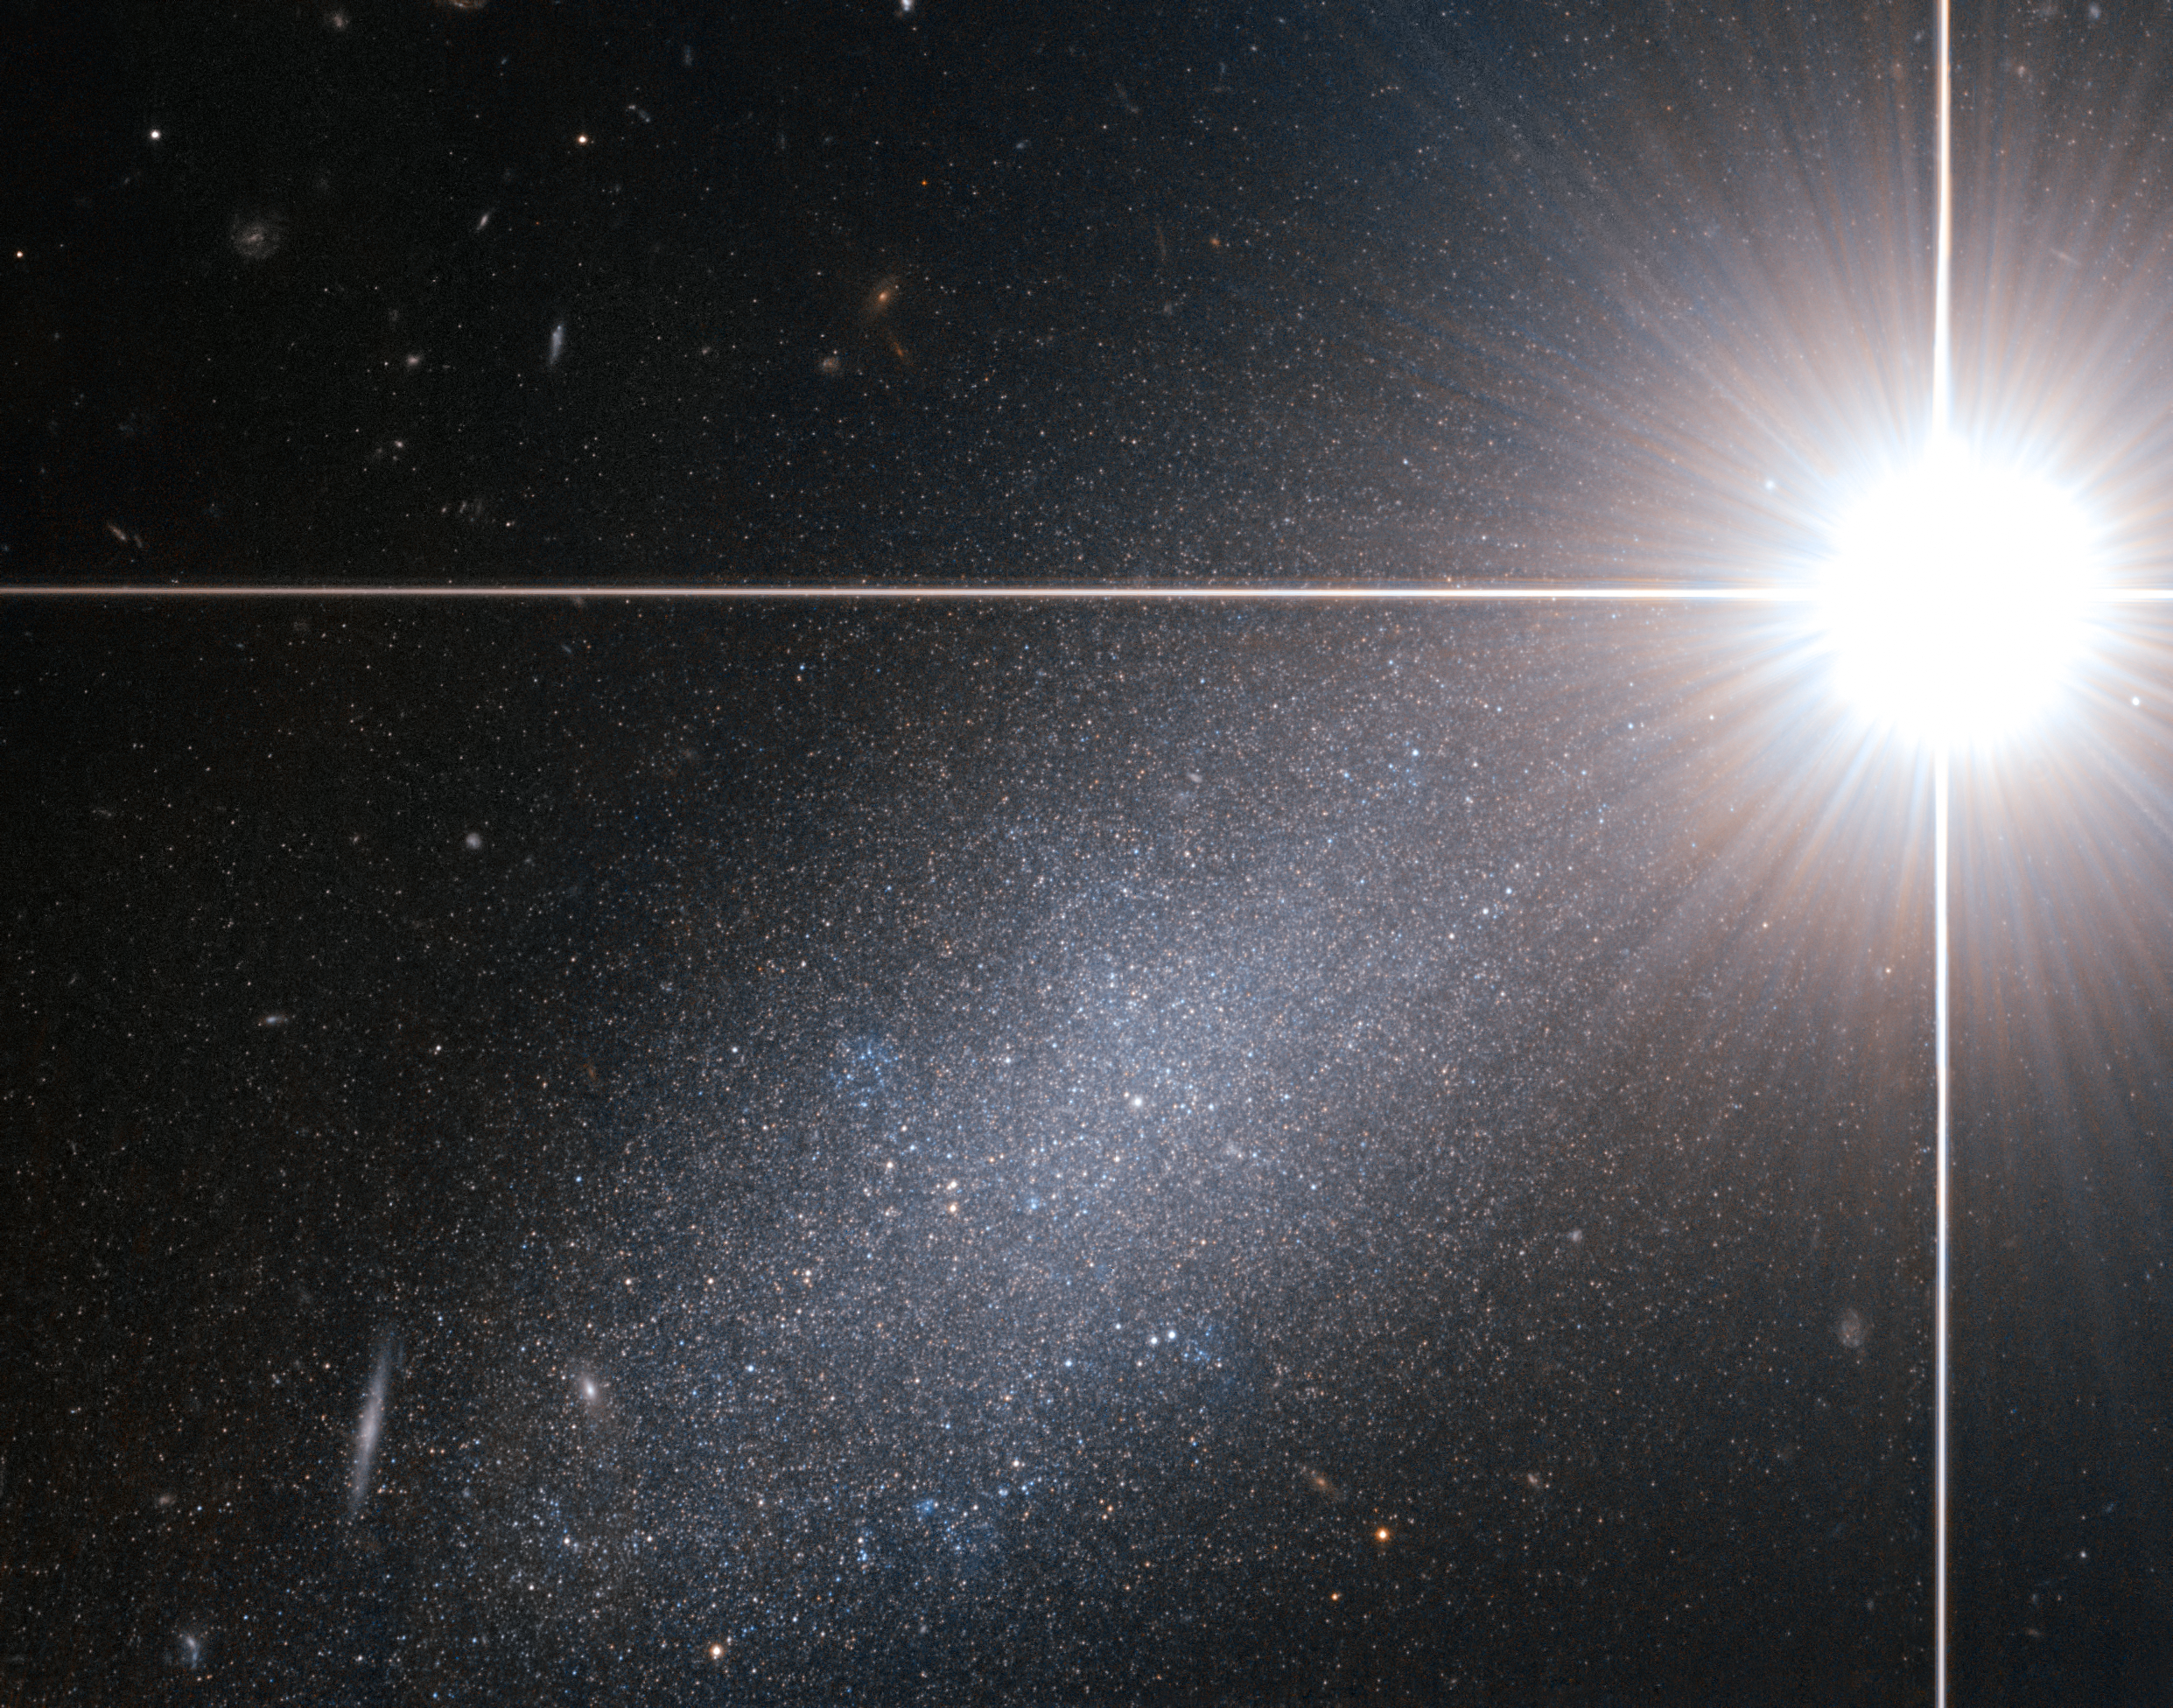

Bright star — faint galaxy

Astronomers are used to encountering challenges in their work, but studying the prosaically-named galaxy PGC 39058 proves more difficult than usual. Due to a stroke of bad luck, a bright star happens to lie between the galaxy and the Earth, meaning our view is partly obscured by the glare of the star. The astounding image from the NASA/ESA Hubble Space Telescope shows the nearby star easily outshining the more distant galaxy PGC 39058. The galaxy is about 14 million light-years away and contains millions of stars — many of them not unlike the bright star in the foreground.

The bright foreground star seems to shine with incredible intensity due to the power of Hubble. Most Earth-bound observers would however consider the star to be quite faint. At magnitude 6.7, binoculars or a small telescope are needed to see it at all. That the image manages to capture both objects serves to further highlight Hubble’s excellent optics and sharp vision.

PGC 39058 is a dwarf galaxy, which explains its faintness despite its modest distance by galaxy standards. The sharp Hubble image easily resolves it completely into its component stars and also reveals many much more distant galaxies in the background.

This star and galaxy pair is located within the constellation of Draco (the Dragon). It is visible in the northern hemisphere, appearing to slither over a large portion of the sky around the north celestial pole. The ancient Greeks claimed that Draco represented Ladon, the dragon with 100 heads. One of Hercules' twelve near-impossible tasks was to steal golden apples guarded by Ladon. The difficulty of this challenge is perhaps on a par with observing such a faint galaxy obscured by a bright star.

This picture was created from images taken using the Wide Field Channel of Hubble’s Advanced Camera for Surveys. Images through yellow (F606W, shown as blue) and near infrared (F814W, shown as red) were combined. The exposure times were 20 minutes and 15 minutes respectively and the field of view is 2 × 1.6 arcminutes.

Credit: ESA/Hubble & NASA